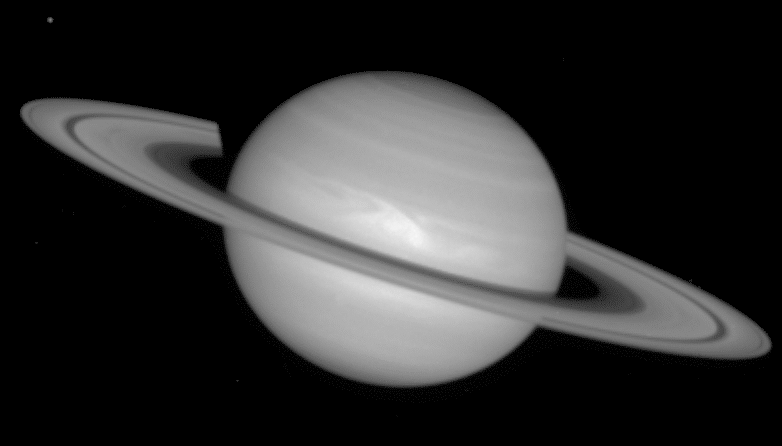

Saturn ring-plane crossing

This picture was taken by Hubble on December 1, 1994 and shows the rings as observers on Earth would know them.

Credit: Reta Beebe (New Mexico State University), D. Gilmore, L. Bergeron (STScI) and NASA/ESA